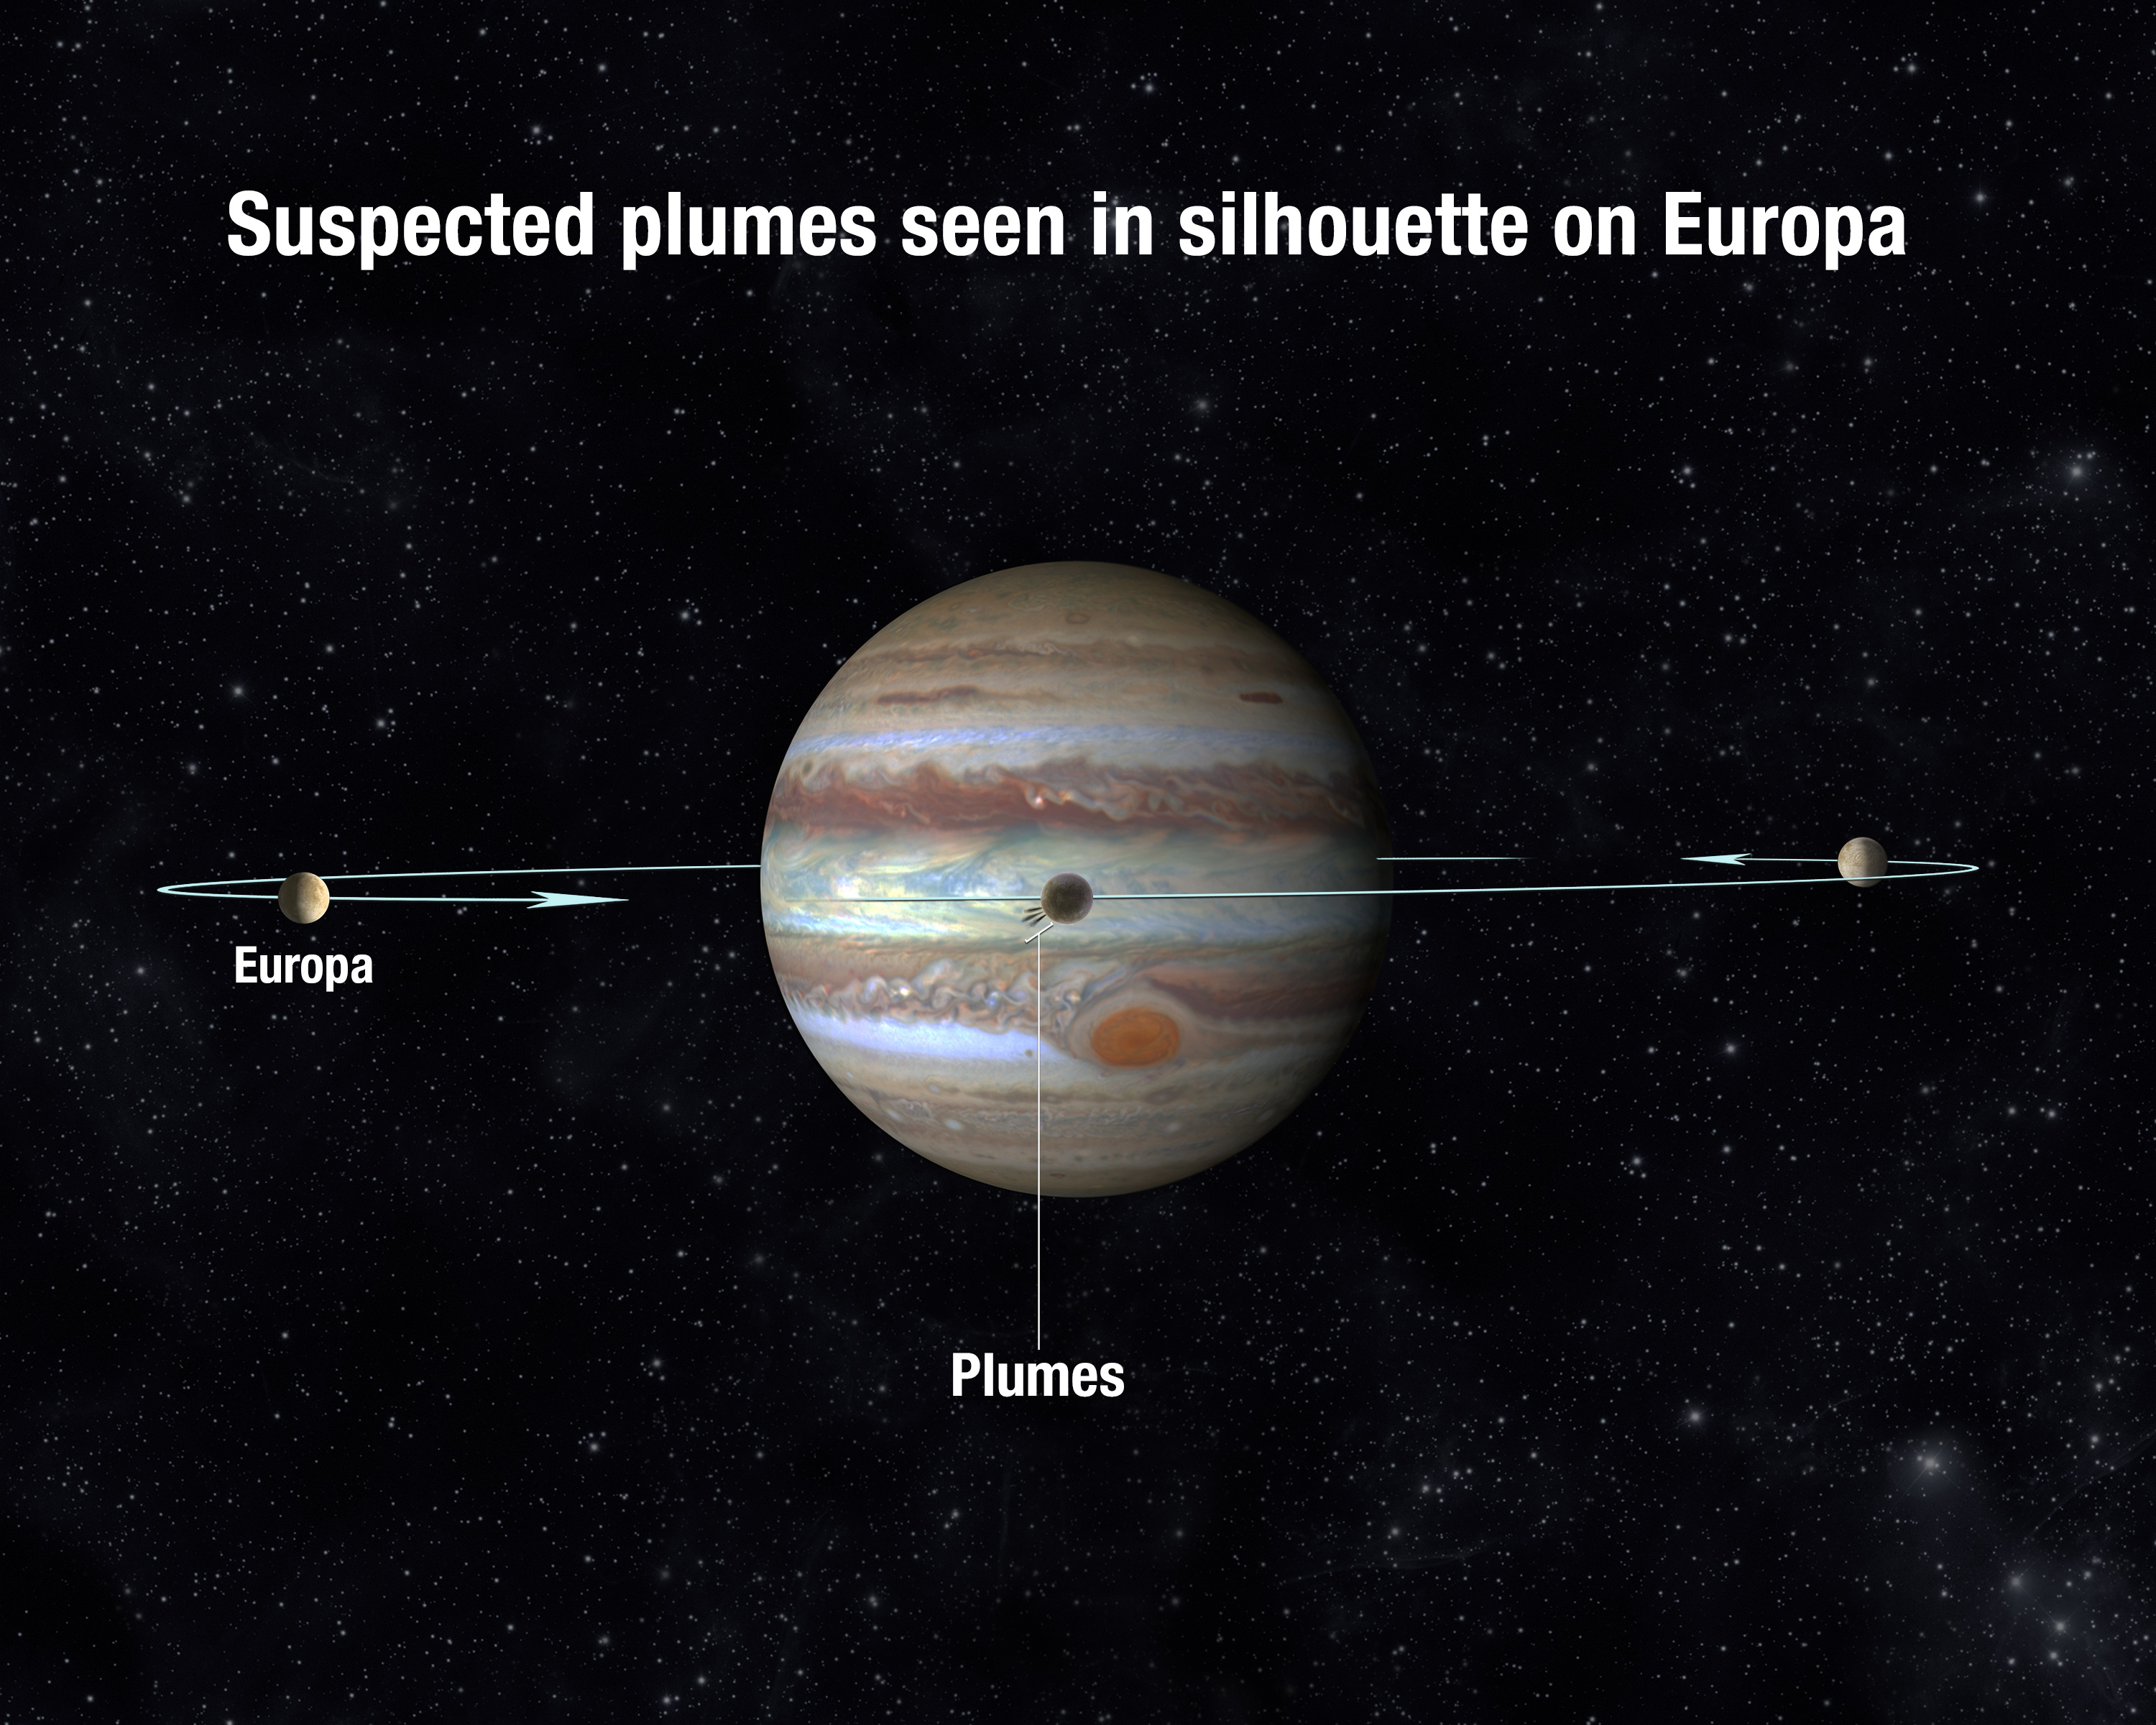

Europa transiting geometry

This diagram shows how the plumes on Europa are seen in silhouette as the moon moves across the face of Jupiter. Europa makes a complete orbit of Jupiter in just 3.5 Earth days.

Credit: NASA, ESA, and A. Feild (STScI)